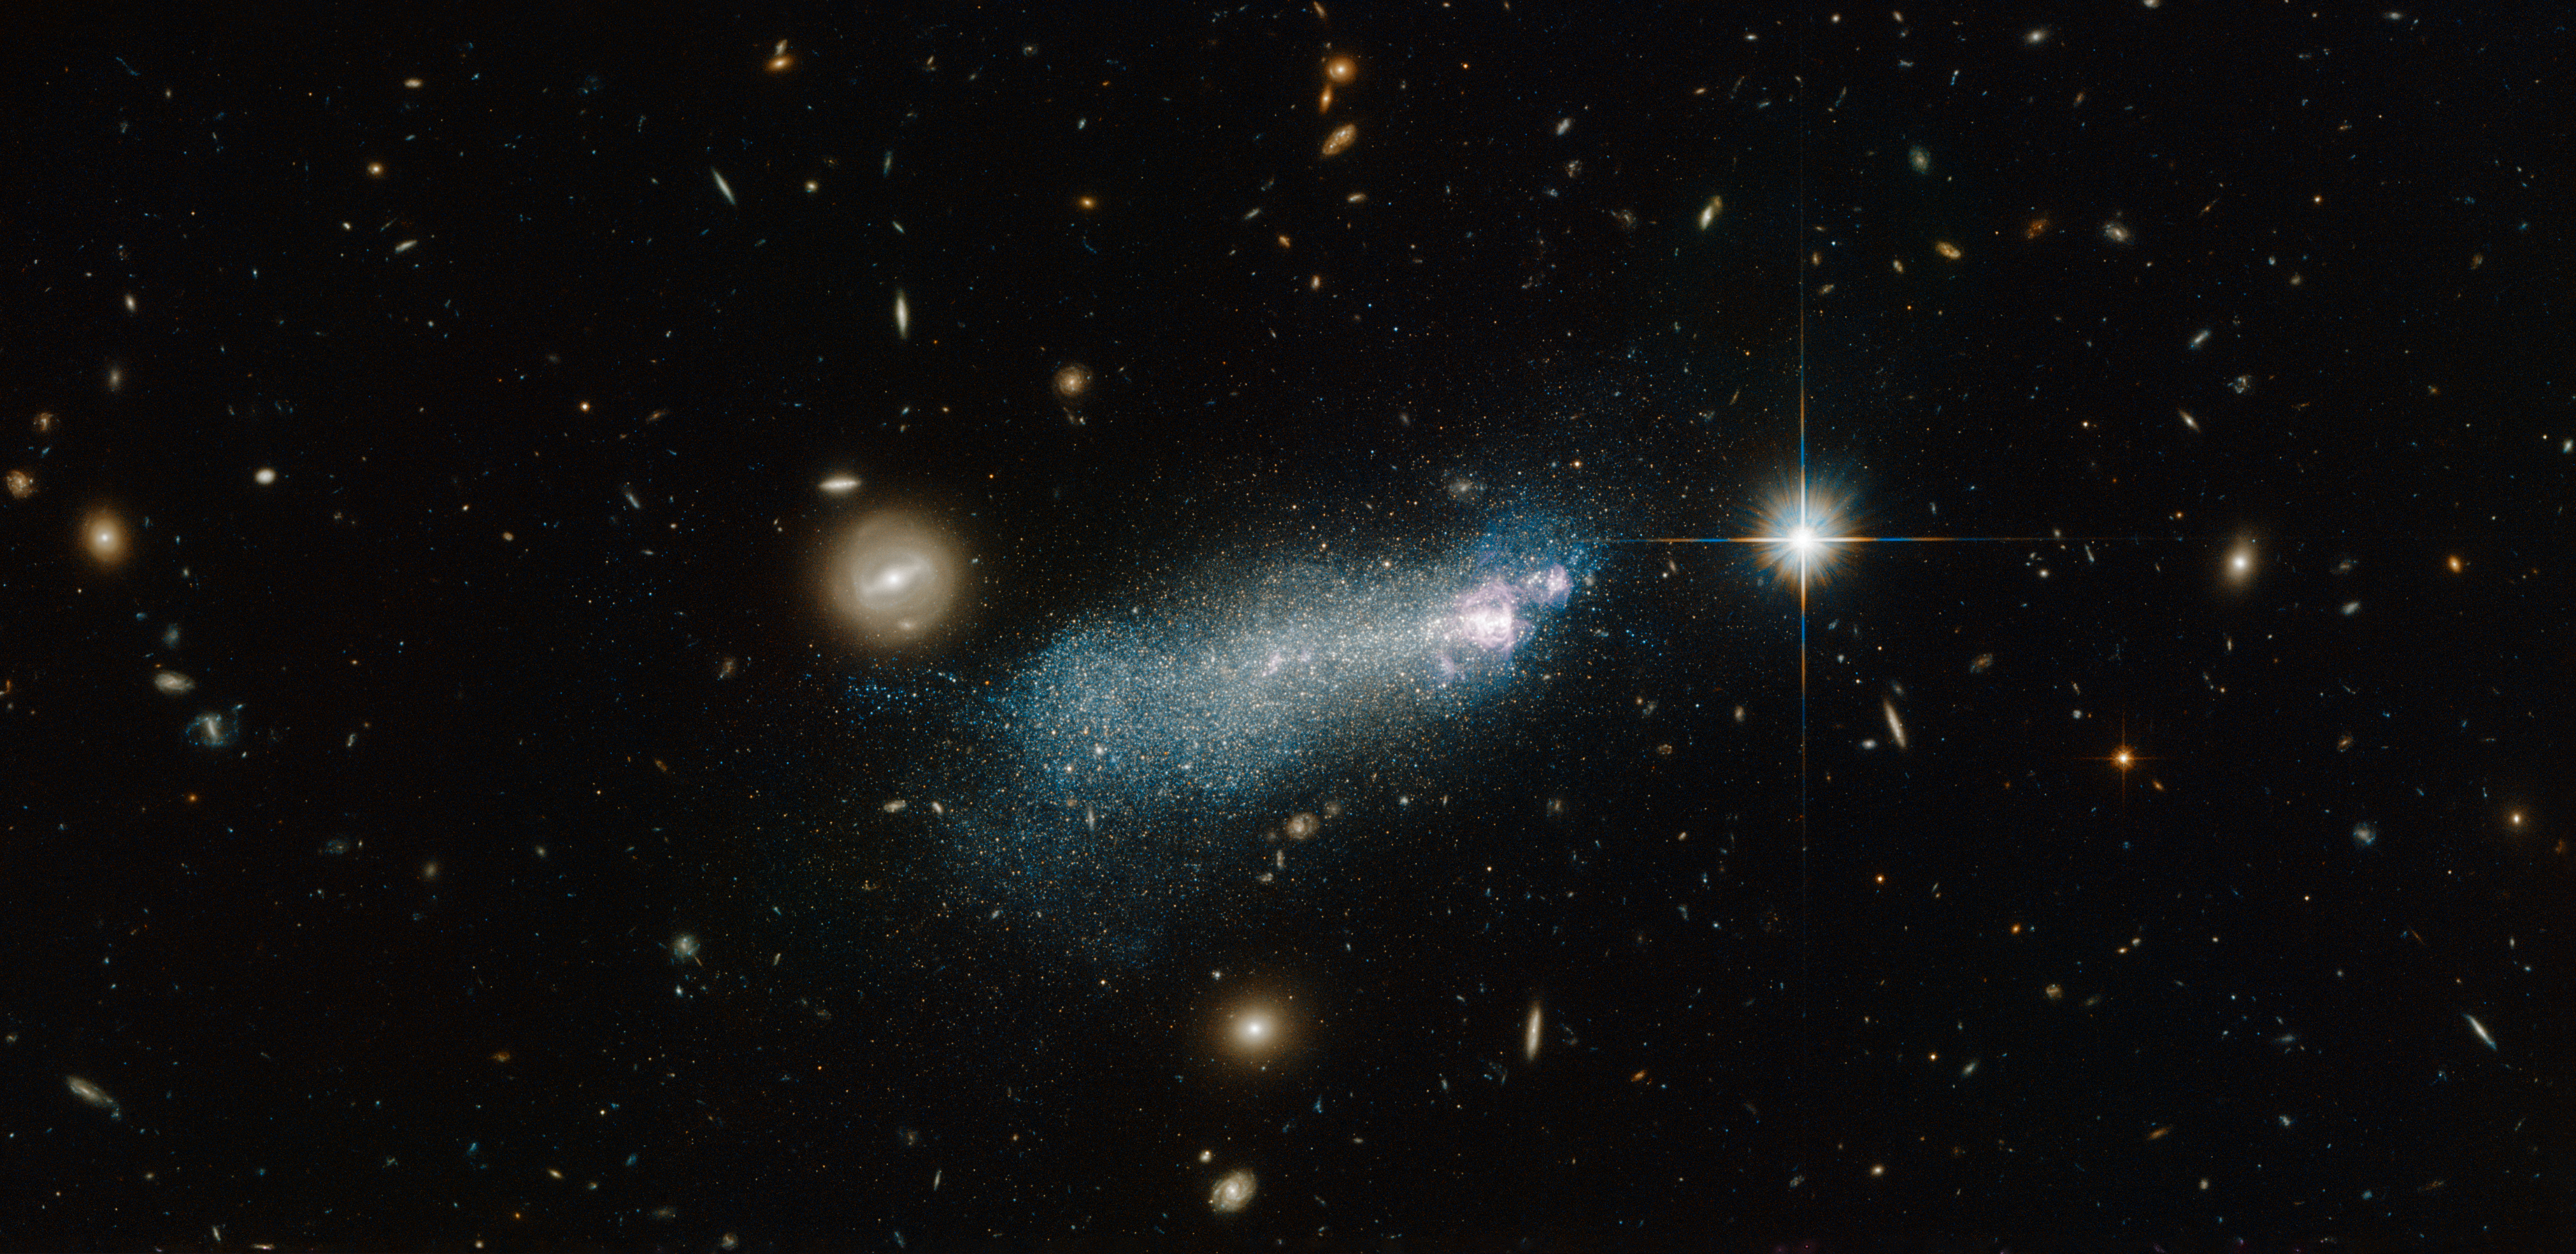

An intriguing young-looking dwarf galaxy

The bright streak of glowing gas and stars in this NASA/ESA Hubble Space Telescope image is known as PGC 51017, or SBSG 1415+437. It is type of galaxy known as a blue compact dwarf.

This particular dwarf is well studied and has an interesting star formation history. Astronomers initially thought that SBS 1415+437 was a very young galaxy currently undergoing its very first burst of star formation, but more recent studies have suggested that the galaxy is in fact a little older, containing stars over 1.3 billion years old.

Starbursts are an area of ongoing research for astronomers — short-lived and intense periods of star formation, during which huge amounts of gas within a galaxy are hungrily used up to form newborn stars.

They have been seen in gas-rich disc galaxies, and in some lower-mass dwarfs. However, it is still unclear whether all dwarf galaxies experience starbursts as part of their evolution. It is possible that dwarf galaxies undergo a star formation cycle, with bursts occurring repeatedly over time.

SBS 1415+437 is an interesting target for another reason. Dwarf galaxies like this are thought to have formed early in the Universe, producing some of the very first stars before merging together to create more massive galaxies. Dwarf galaxies which contain very few of the heavier elements formed from having several generations of stars, like SBS 1415+437, remain some of the best places to study star-forming processes similar to those thought to occur in the early Universe. However, it seems that our nearby patch of the Universe may not contain any galaxies that are currently undergoing their first burst of star formation.

A version of this image was entered into the Hubble’s Hidden Treasures image processing competition by contestant Nick Rose.

Credit: ESA/Hubble & NASA Acknowledgement: Alessandra Aloisi (STScI) and Nick Rose